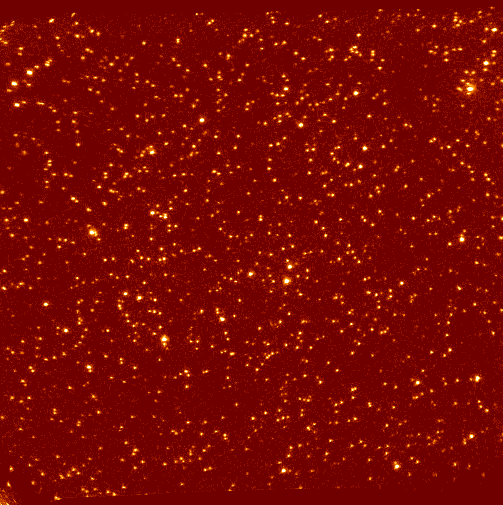

Star cluster

This is an image of a star cluster.

Credit: Dr. R. Jedrzejewski (STScI), NASA, ESA